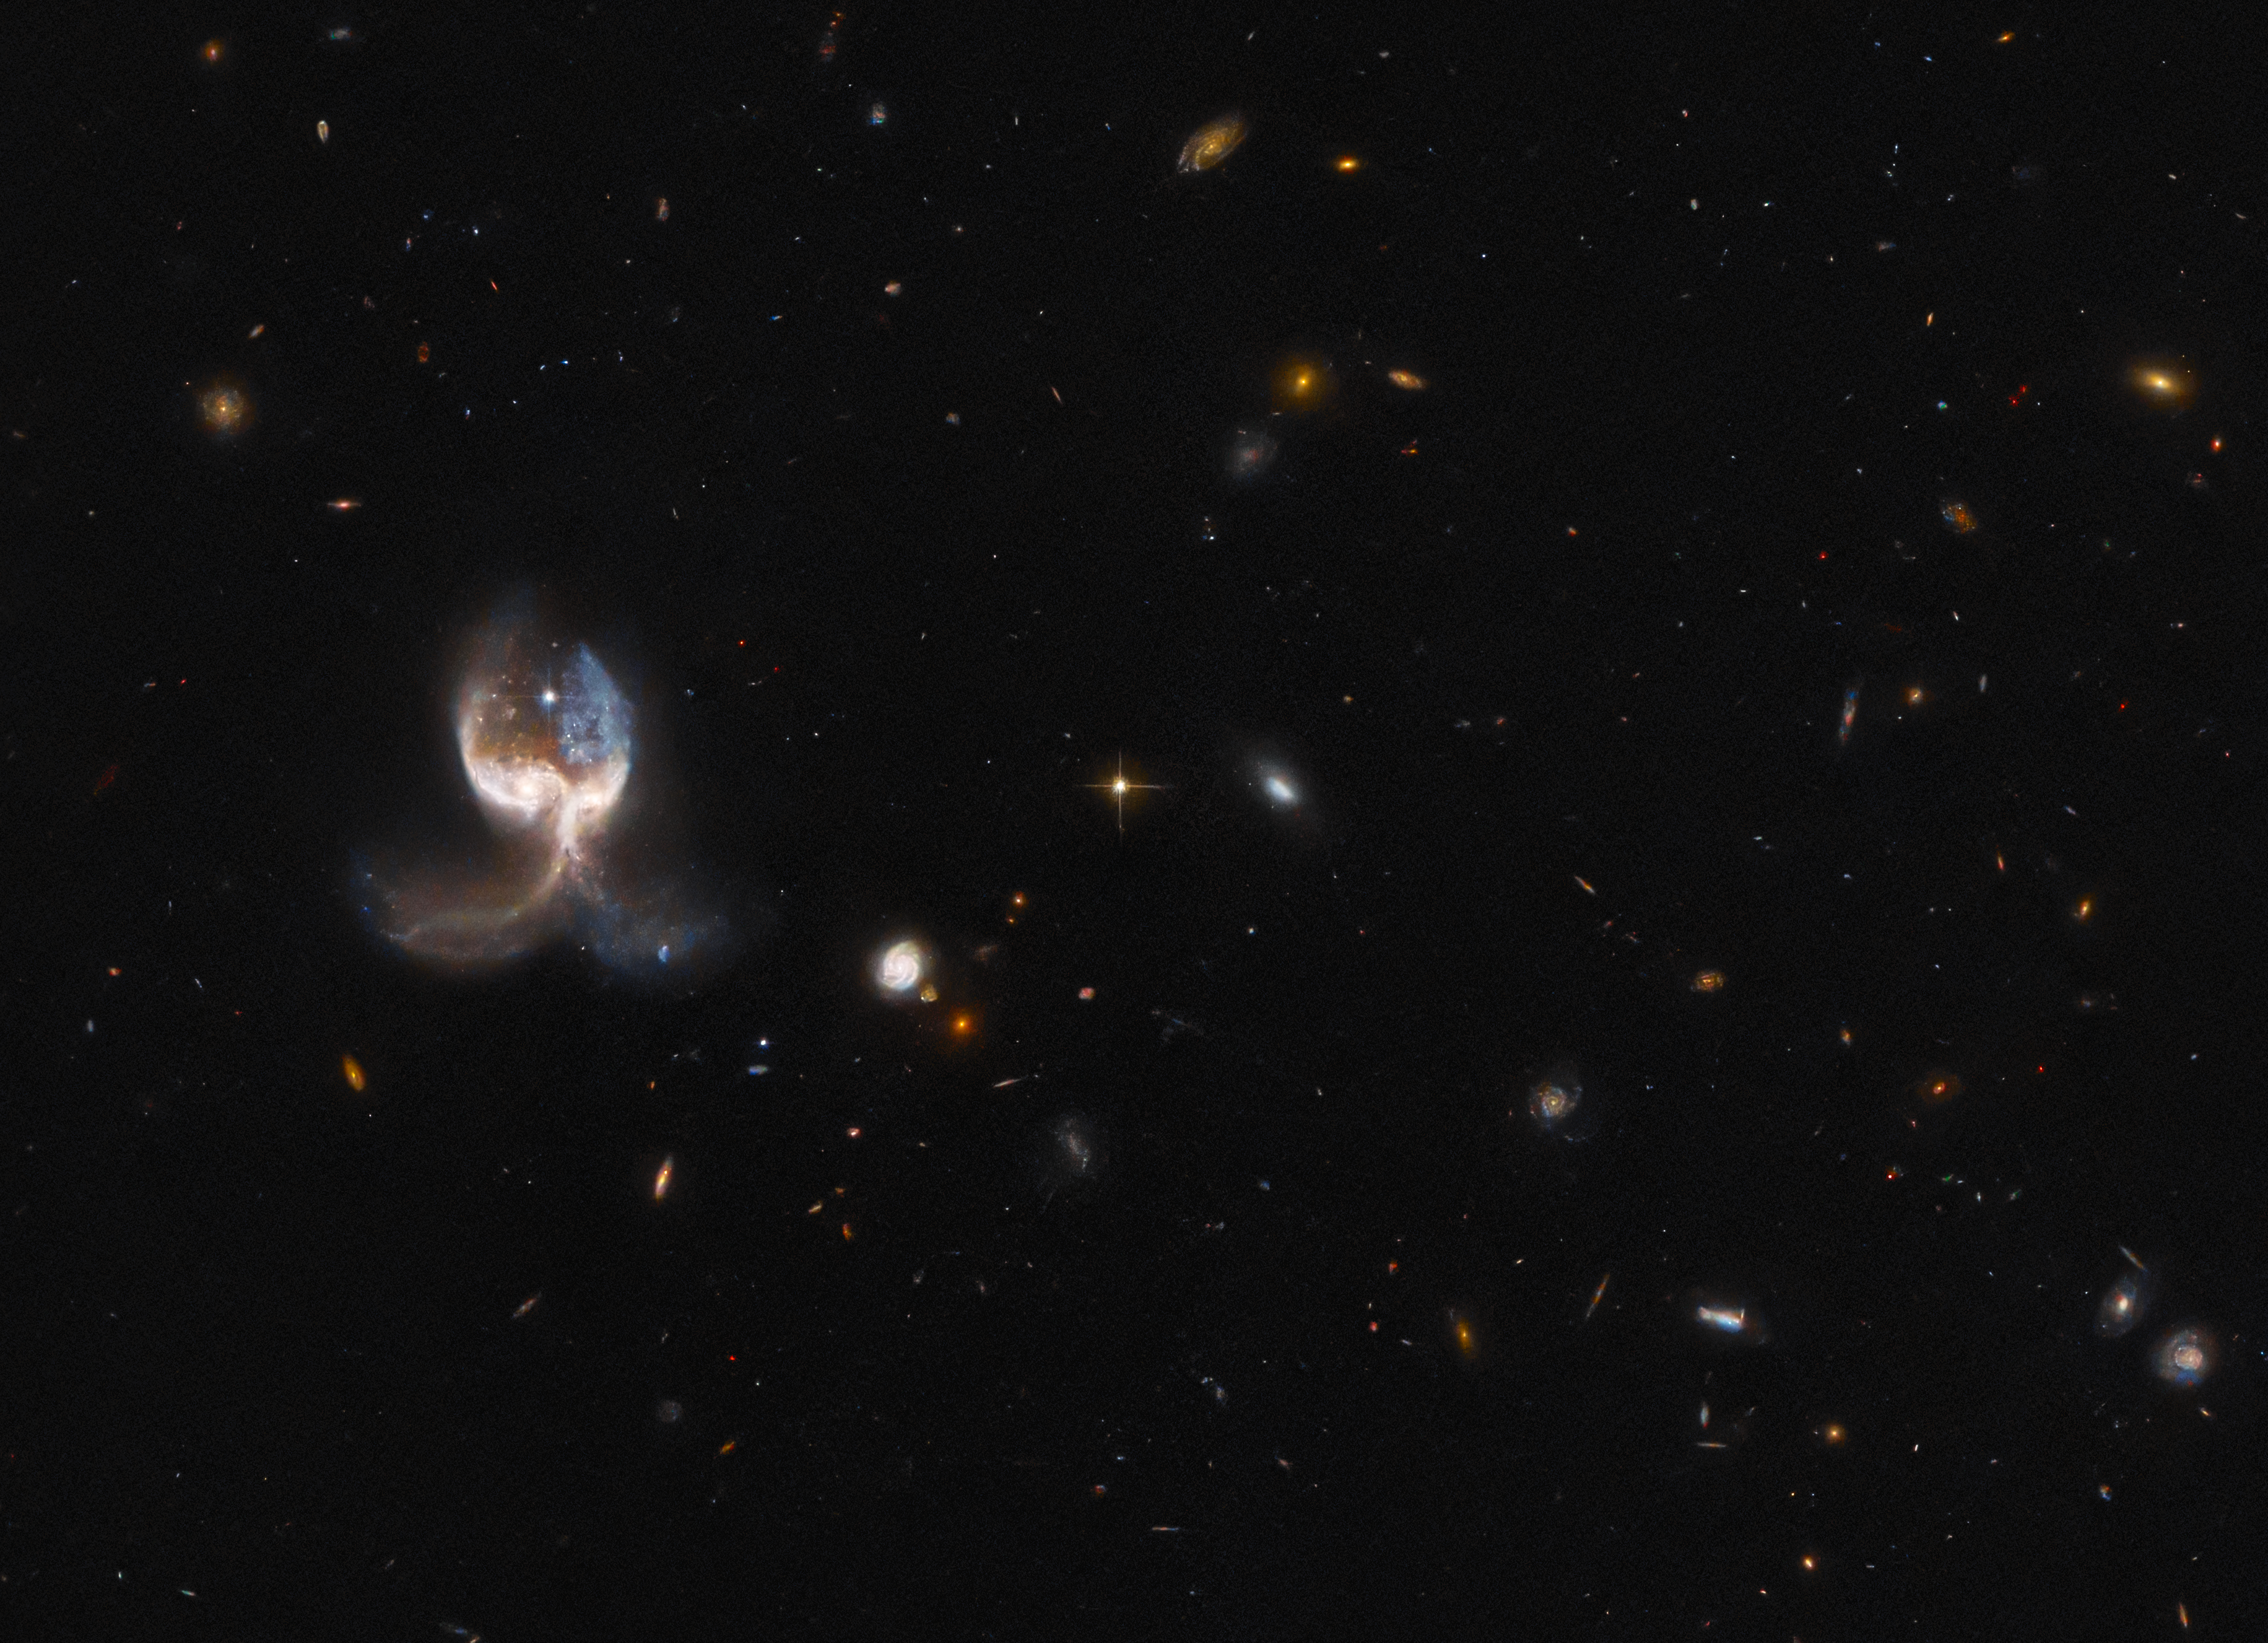

Hubble Inspects a Set of Galactic Wings

Two merging galaxies in the VV689 system — nicknamed the Angel Wing —feature in this image from the NASA/ESA Hubble Space Telescope. Unlike chance alignments of galaxies which only appear to overlap as seen from our vantage point on Earth, the two galaxies in VV689 are in the midst of a collision. The galactic interaction has left the VV689 system almost completely symmetrical, giving the impression of a vast set of galactic wings.

This angelic image comes from a set of Hubble observations inspecting the highlights of the Galaxy Zoo citizen science project. This crowdsourced astronomy project relied on hundreds of thousands of volunteers to classify galaxies and help astronomers wade through a deluge of data from robotic telescopes. In the process, volunteers discovered a rogues’ gallery of weird and wonderful galaxy types, some of which had not previously been studied. A similar, ongoing project called Radio Galaxy Zoo is using the same crowdsourcing approach to locate supermassive black holes in distant galaxies.

Noteworthy objects from both projects were chosen for detailed follow-up observations with Hubble’s Advanced Camera for Surveys. In keeping with the crowdsourced nature of the Galaxy Zoo project, the targets for follow-up observations with Hubble were chosen via roughly 18 000 votes cast by the public. The selected targets include ring-shaped galaxies, unusual spirals, and a striking selection of galaxy mergers such as VV689.

Credit: ESA/Hubble & NASA, W. Keel. Acknowledgement: J. Schmidt